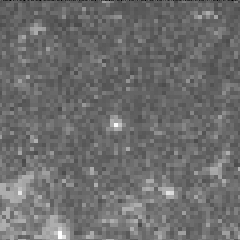

Cepheid variable star in galaxy M100

The interval it takes for the Cepheid to complete one pulsation is a direct indication of the stars's intrinsic brightness. This value can be used to make a precise measurement of the galaxy's distance, which turns out to be 56 million light-years from Earth. This images was taken on May 20, 1994.

Credit: Dr. Wendy L. Freedman, Observatories of the Carnegie Institution of Washington, and NASA/ESA